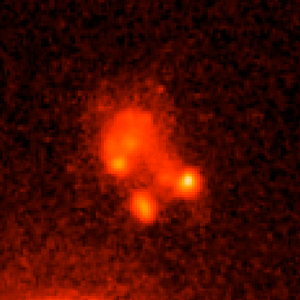

Gamma-ray Burst Host Galaxy GRB020903

This is an image of Gamma-ray Burst Host Galaxy GRB020903. Long-duration gamma-ray bursts are powerful flashes of high-energy radiation that are sometimes seen coming from supernovae — the explosions of extremely massive stars. This image is one of a set of images taken by NASA’s Hubble Space Telescope which show the galaxies that host these bursts and could help to tell us more about their cause.

Credit: NASA, ESA, A. Fruchter (STScI), and the GOSH Collaboration